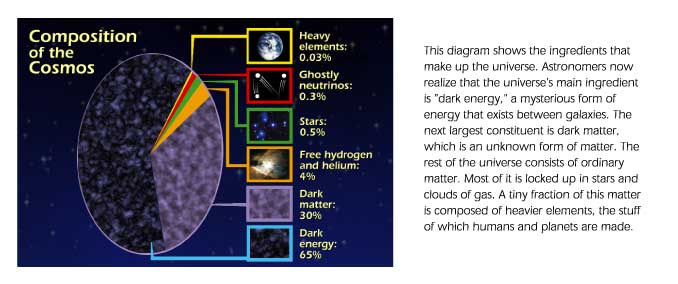

Composition of the cosmos

This diagram shows the ingredients that make up the Universe. Astronomers now realize that the universe's main ingredient is a 'dark energy', a mysterious form of energy that exists between galaxies.

Credit: Ann Feild (STScI)